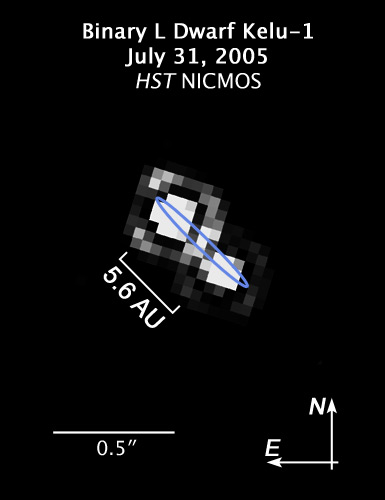

Compass and scale image of binary L dwarf Kelu-1

This pixelated image taken by the ESO/NASA Hubble Space Telescope shows the system Kelu-1. This star systems consists of two brown dwarfs and is located in the constellation of Hydra, 61 light years away. It is among the first brown dwarf dicovered, which were not part of a system containing a later-than-M-type star. The image was taken in July 31, 2005, and shows how close the two brown dwarfs are to each other with a distance of only 5.6 times the distance earth-Sun.

Observations made between 2005 and 2008 by a german team of astronomers who used data from Hubble, the Very Large Telescope and the Spitzer Space Telescope suggest, that the system even contains a third, so far undetected, component.

Credit: NASA, ESA and M. Stumpf (MPIA)